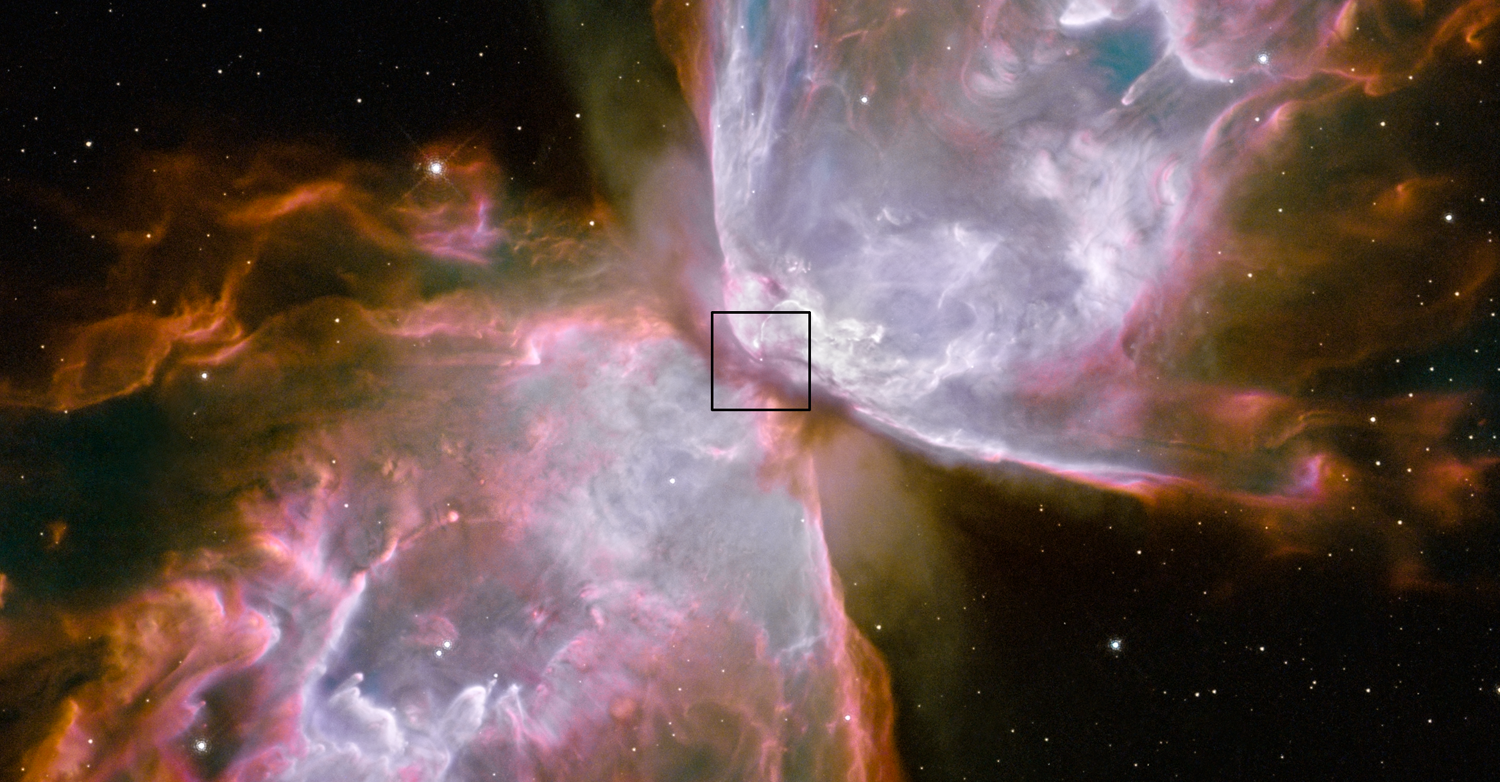

Central star in Bug Nebula found

An elusive, very hot star at the centre of one of the most well-known and spectacular planetary nebulae has been directly detected. Using the brand-new Wide Field Camera 3 (WFC3) in six narrow band filters, researchers from the European Southern Observatory, the University of Manchester and CSIC (Granada, Spain) have located and partially characterized the dying star.

Astronomers estimate that the star, which began its life as few times more massive then the Sun, is now is a little over half the mass of the Sun. After it expelled its outer envelope some 2200 years ago, the star now has an extremely high temperature, anywhere from 200 000 K to 400 000 K — one of the hottest ever detected. It is fading very rapidly and will cool down very slowly to a small and cold white dwarf.

The Bug Nebula (also known as the Butterfly Nebula), or NGC 6302, was one of Hubble's first targets after the observatory was rejuvenated in May 2009.

Credit: NASA & ESA